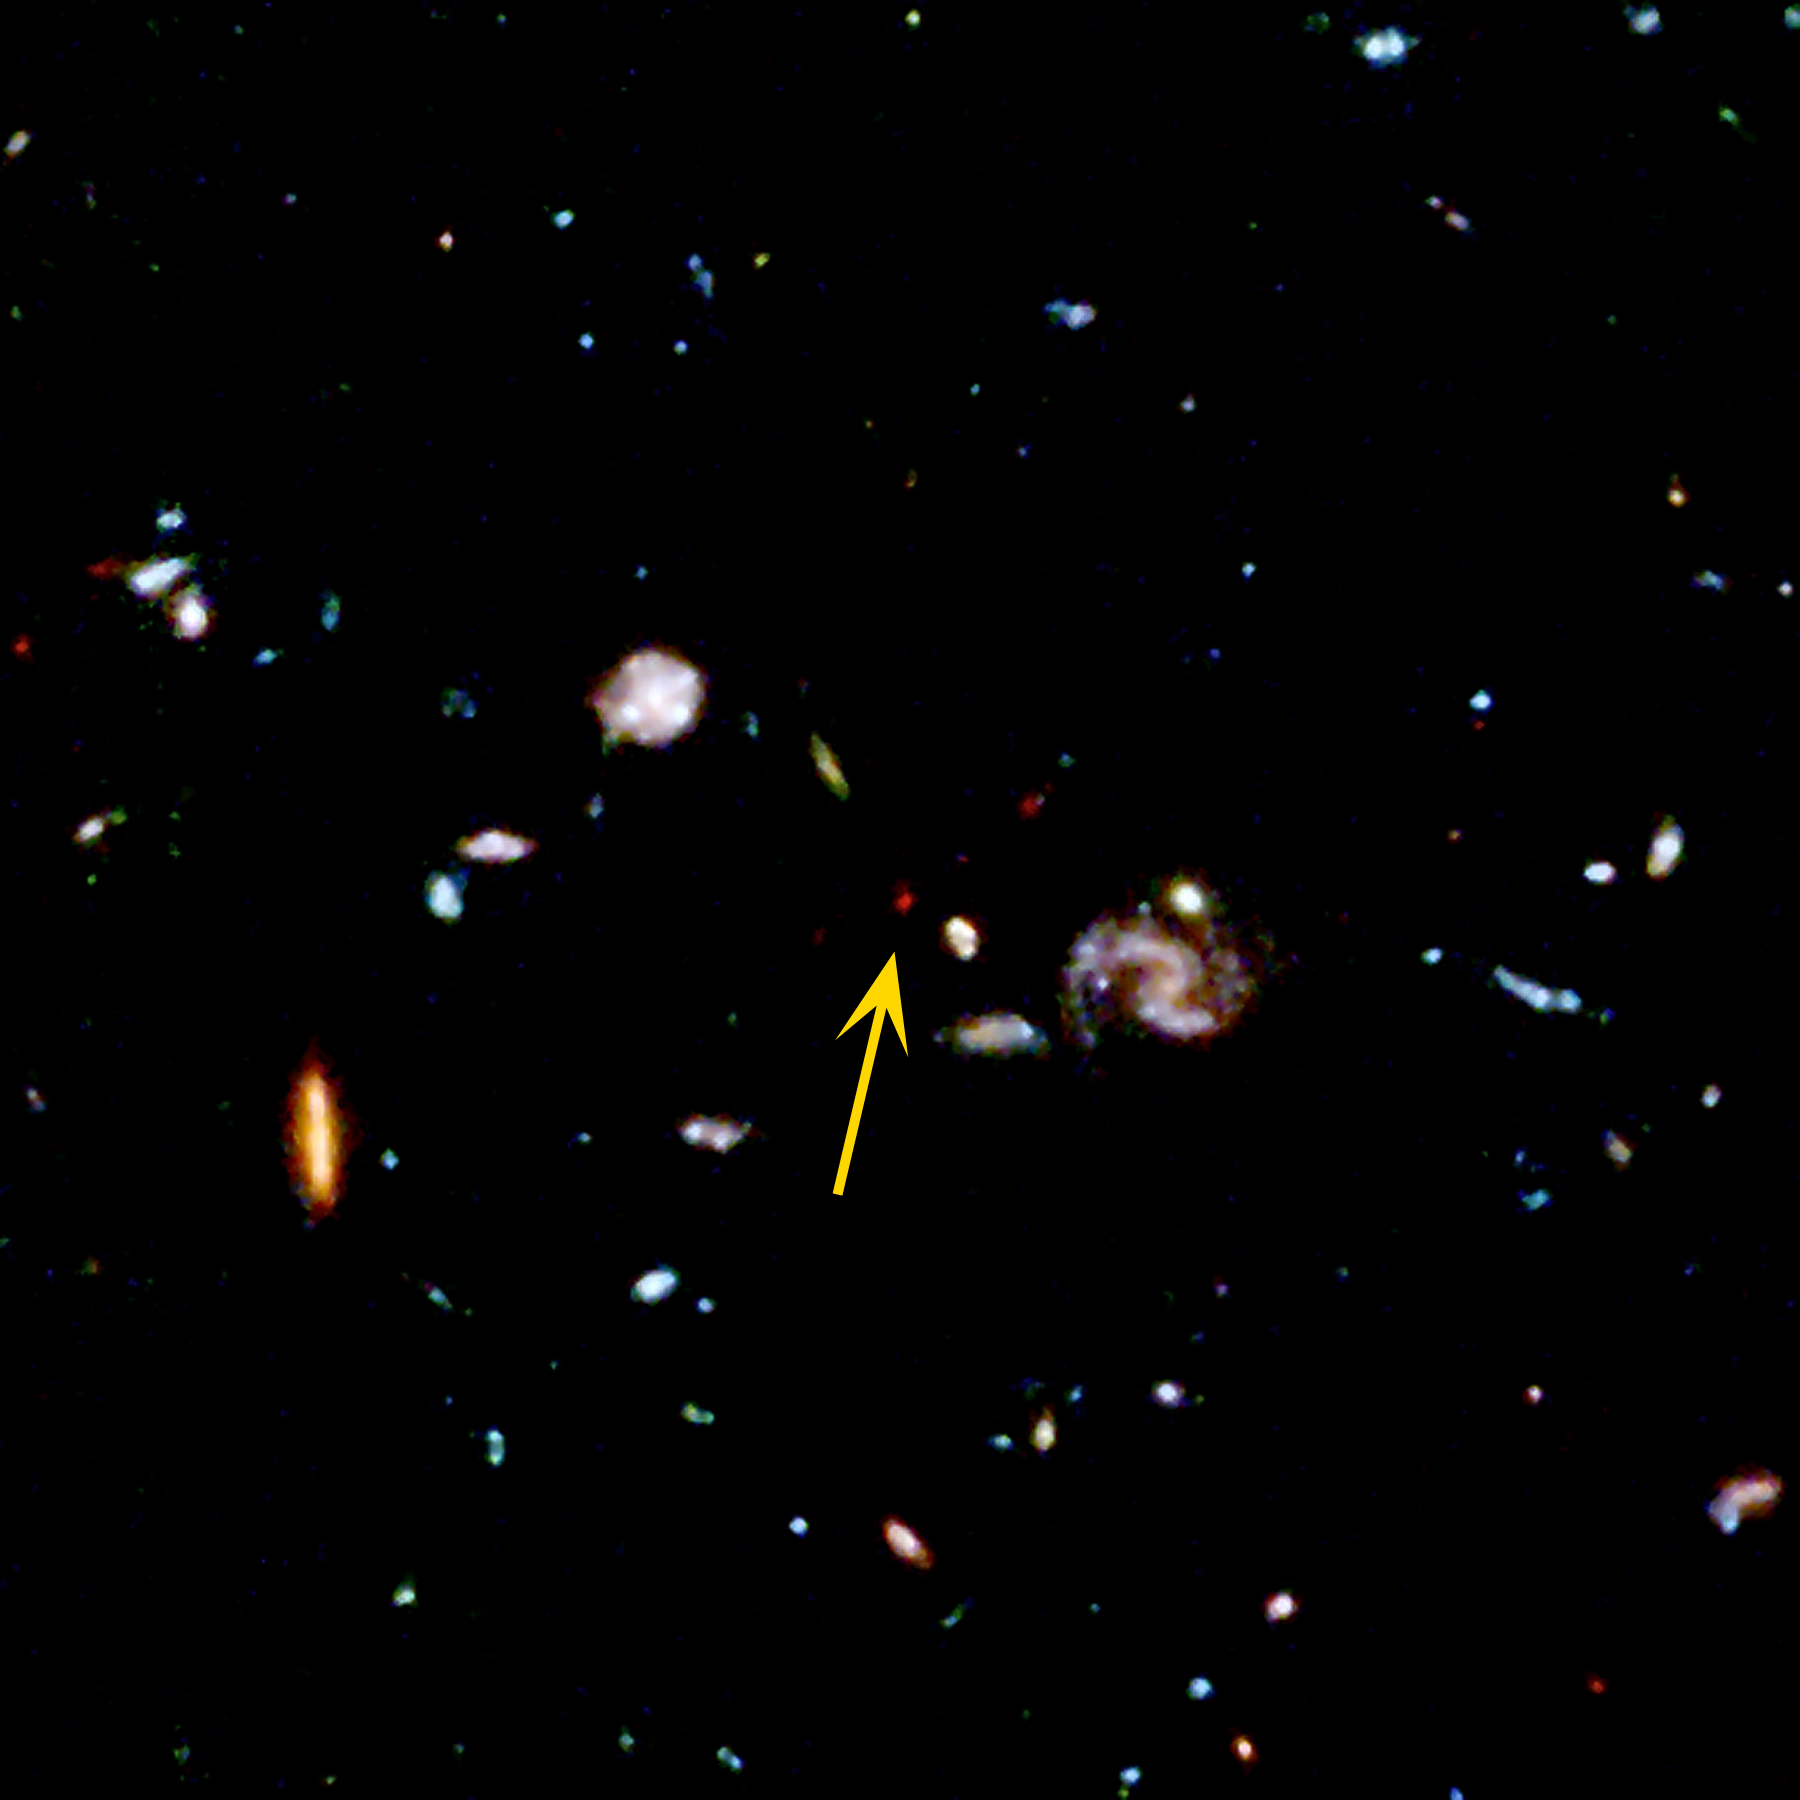

Faint Galaxy in the Hubble Deep Field

Small portion of the Hubble Deep Field image -- the deepest view of the universe taken with the Hubble Space Telescope. The arrow points to a very faint galaxy that appears to be more distant than any known previously. Other galaxies in the image are at smaller distances.

Credit: Ken Lanzetta and Amos Yahil (State University of New York at Stony Brook), and NASA/ESA